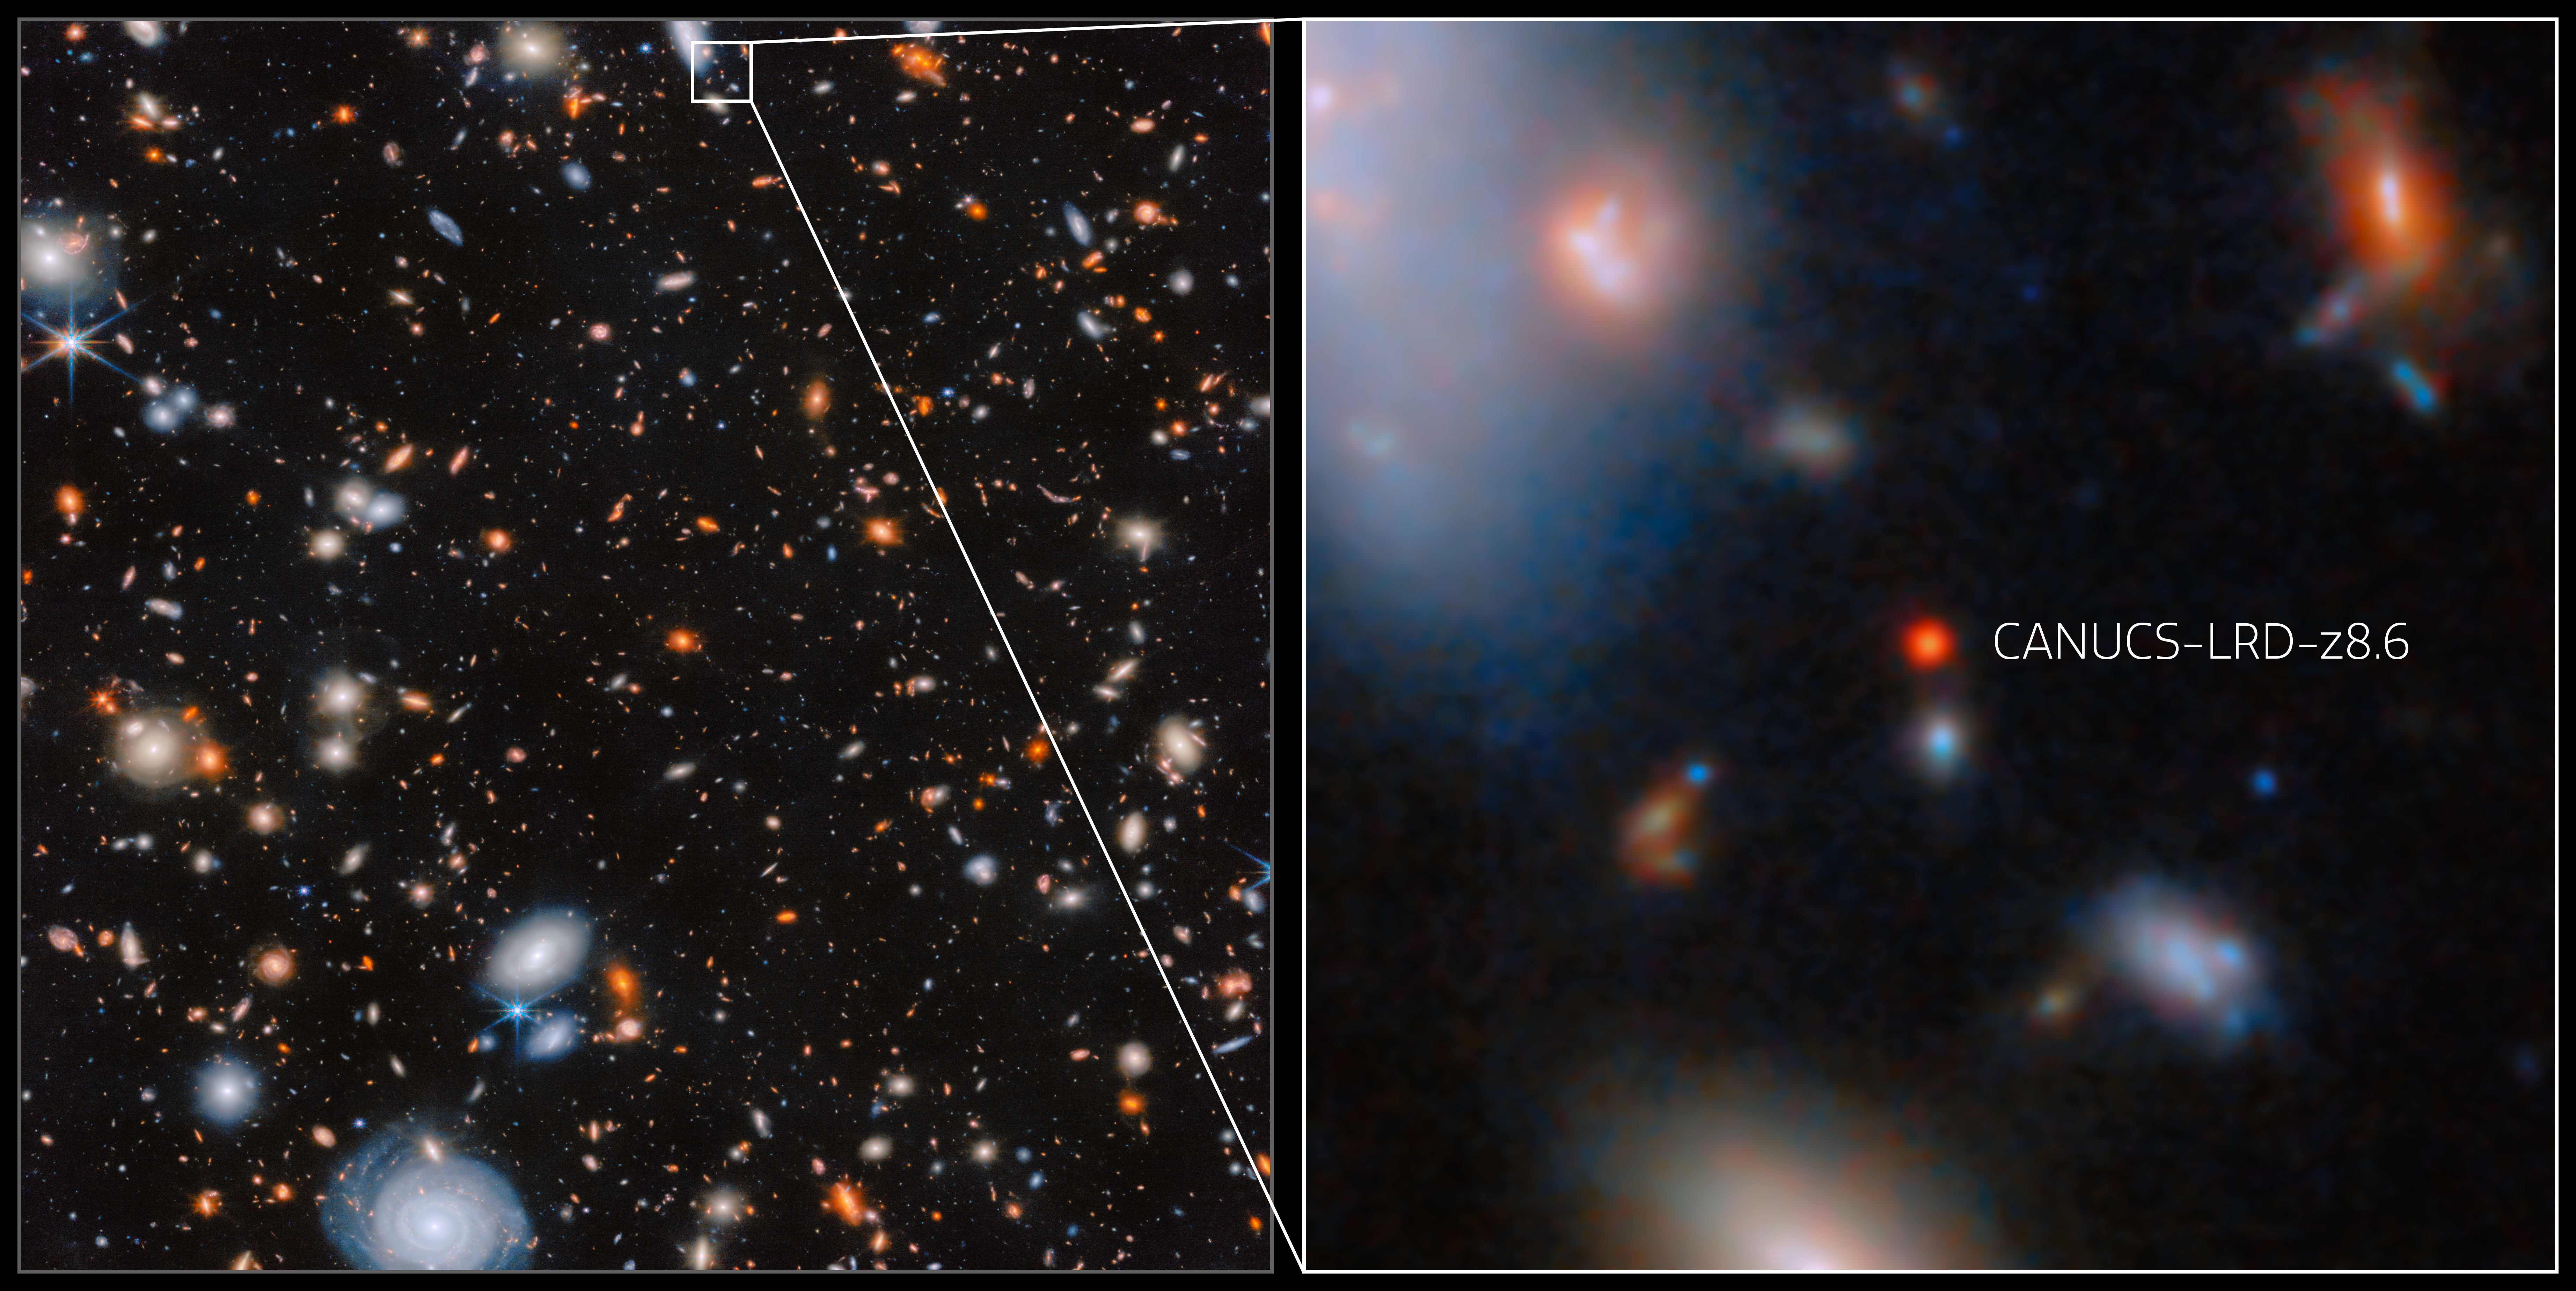

CANUCS-LRD-z8.6 in MACS J1149.5+2223

This image shows the location of galaxy CANUCS-LRD-z8.6 in galaxy cluster MACS J1149.5+2223, as seen by Webb’s Near-Infrared Camera (NIRCam). CANUCS-LRD-z8.6 is part of a class of small, very distant and strikingly red galaxies called Little Red Dots (LRDs), which have been spotted in increasing numbers by Webb’s surveys of the early Universe. It is located in the constellation Leo (the Lion), and is seen by Webb just 570 million years after the Big Bang.

With the help of Webb’s Near-Infrared Spectrograph (NIRSpec), researchers have confirmed an actively growing supermassive black hole in CANUCS-LRD-z8.6. Analysing the galaxy’s spectrum yielded an estimate of the black hole’s mass, revealing it to be unusually large for such an early stage in the Universe, and showed that CANUCS-LRD-z8.6 is compact and has not yet produced many heavy elements (a galaxy at an early stage of its evolution). This combination challenges existing theories about the formation of galaxies and black holes in the early Universe.

Credit: ESA/Webb, NASA & CSA, G. Rihtaršič (University of Ljubljana, FMF), R. Tripodi (University of Ljubljana, FMF)